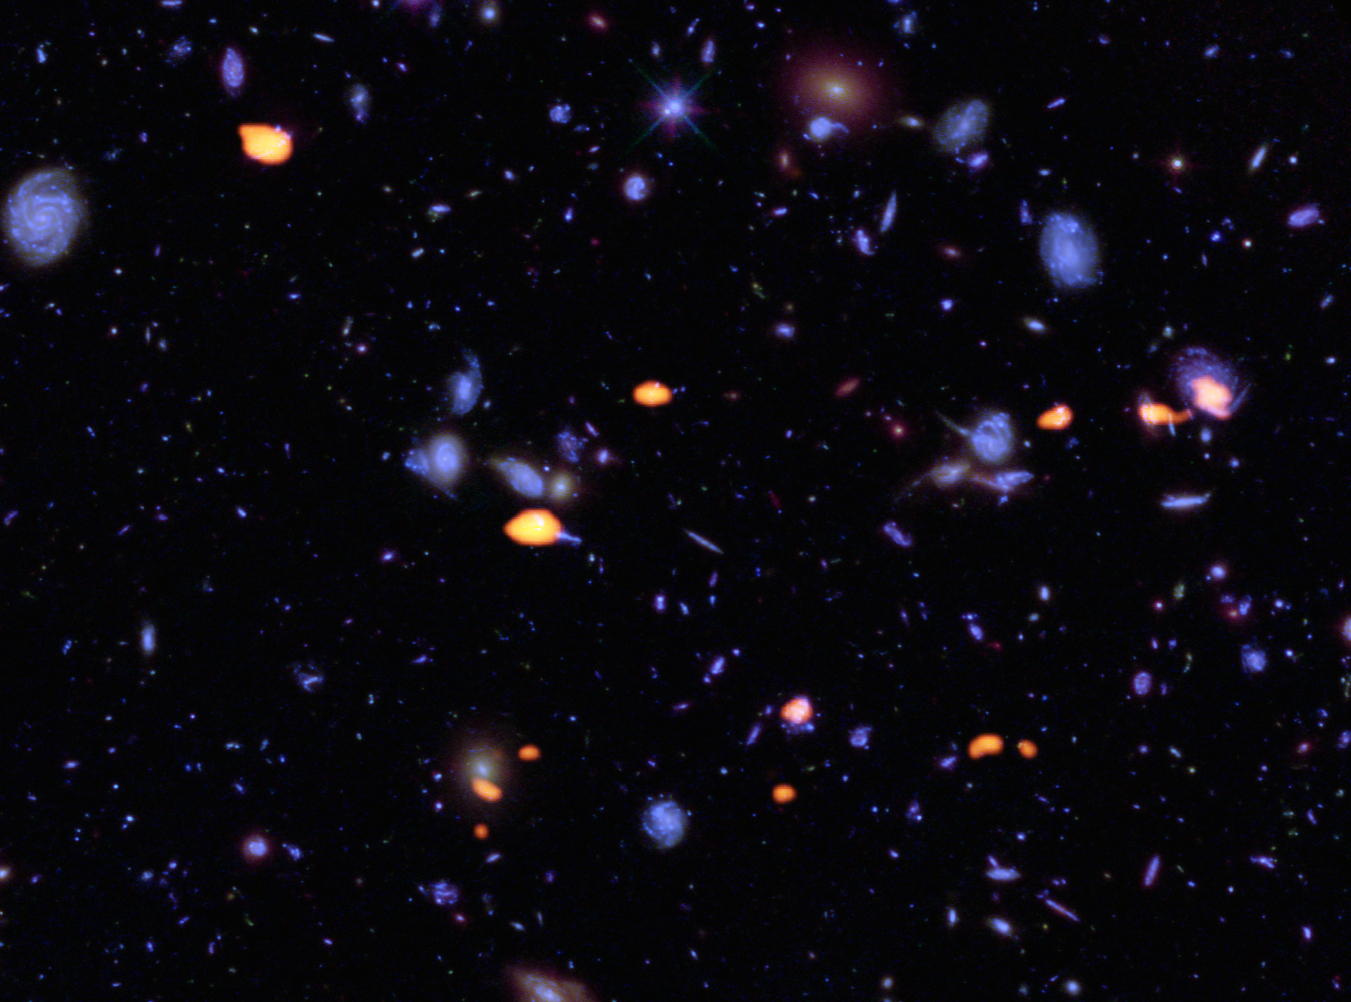

ALMA deep view of part of the Hubble Ultra Deep Field

A trove of galaxies, rich in carbon monoxide (indicating star-forming potential) were imaged by the Atacama Large Millimeter/submillimeter Array (ALMA) (orange) in the Hubble Ultra Deep Field. The blue features are galaxies imaged by Hubble.

This image is based on the very deep ALMA survey by Manuel Aravena, Fabian Walter and colleagues, covering about one sixth of the full Hubble Ultra Deep Field area.

Credit: B. Saxton (NRAO/AUI/NSF); ALMA (ESO/NAOJ/NRAO); NASA/ESA Hubble